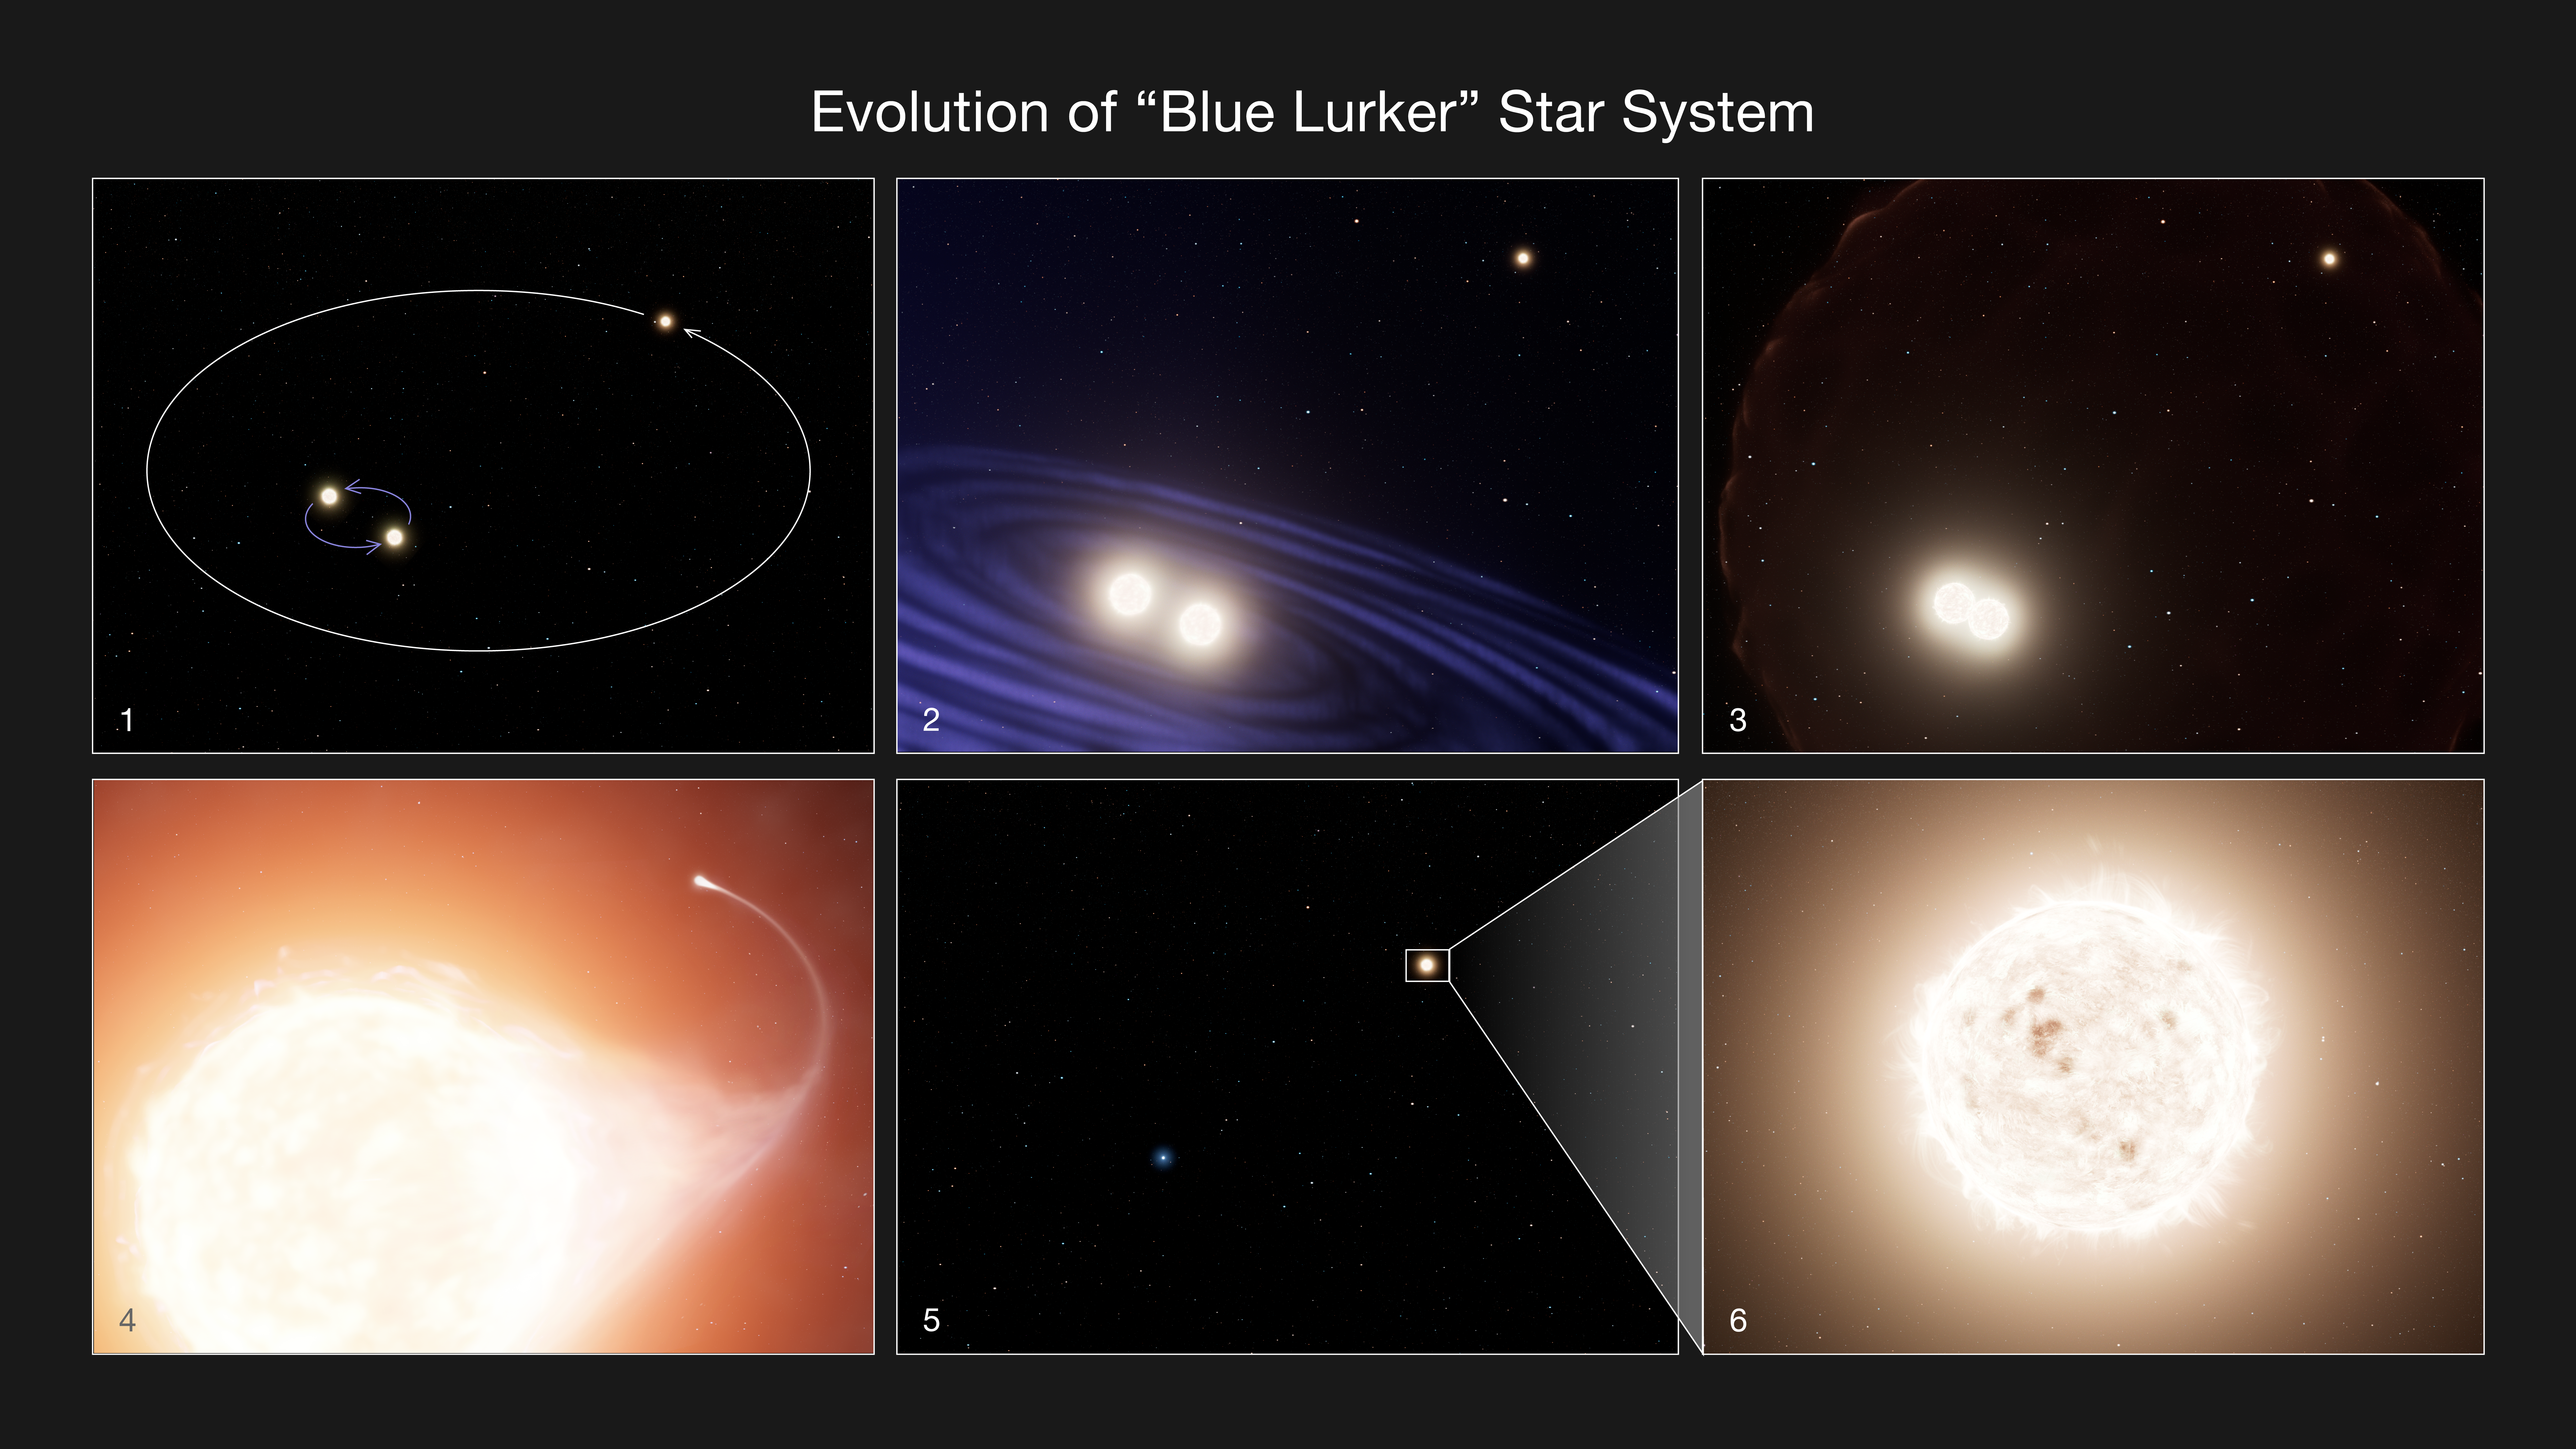

Evolution of a “Blue Lurker” star in a triple system (artist’s impression)

The name “blue lurker” might sound like a villainous character from the golden age of radio. In reality it is a rare class of star that the NASA/ESA Hubble Space Telescope explored by looking deeply into the open star cluster M67, roughly 2,800 light-years away.

Forensics with Hubble data show that the star has had a tumultuous life, mixing it up with two other stars gravitationally bound together in a remarkable triple-star system. The star has a kinship to so-called “blue stragglers” that are hotter, brighter, and bluer than expected because they’ve absorbed the mass of their companion stars.

The blue lurker was identified because it is spinning much faster than expected. Otherwise it looks like a normal Sun-like star. The term “blue” is a bit of a misnomer here because the star’s color blends in with all the other solar-mass stars in the cluster. Hence it is sort of “lurking” among the common stellar population.

The spin rate is evidence that the lurker must have siphoned in material from a companion star, causing its rotation to speed up. The star’s high spin rate was discovered with NASA’s decommissioned Kepler space telescope. While normal Sun-like stars typically take about 30 days to complete one rotation, the lurker takes only four days.

These results are being presented at the 245th meeting of the American Astronomical Society in Washington, D.C.

Panel 1: A triple star system containing three sunlike stars. Two are very tightly orbiting. The third star has a much wider orbit.

Panels 2-3: The close stellar pair spiral together and merge to form one more massive star.

Panel 4: The merged star evolves into a giant star. As the huge photosphere expands, some of the material falls onto the outer companion, causing the companion to grow larger and its rotation rate to increase.

Panel 5: The central merged star eventually burns out and forms a massive white dwarf, and the outer companion spirals in towards the white dwarf, leaving a binary star system with a tighter orbit.

Panel 6: The surviving outer companion is much like our sun but nicknamed a “blue lurker.” Although it is slightly brighter blue than expected because of the earlier mass-transfer from the central star and is now rotating very rapidly, these features are subtle. The star could easily be mistaken for a normal sun-like star despite its exotic evolutionary history.

Credit: NASA, ESA, E. Leiner (Illinois Institute of Technology), L. Hustak (STScI)